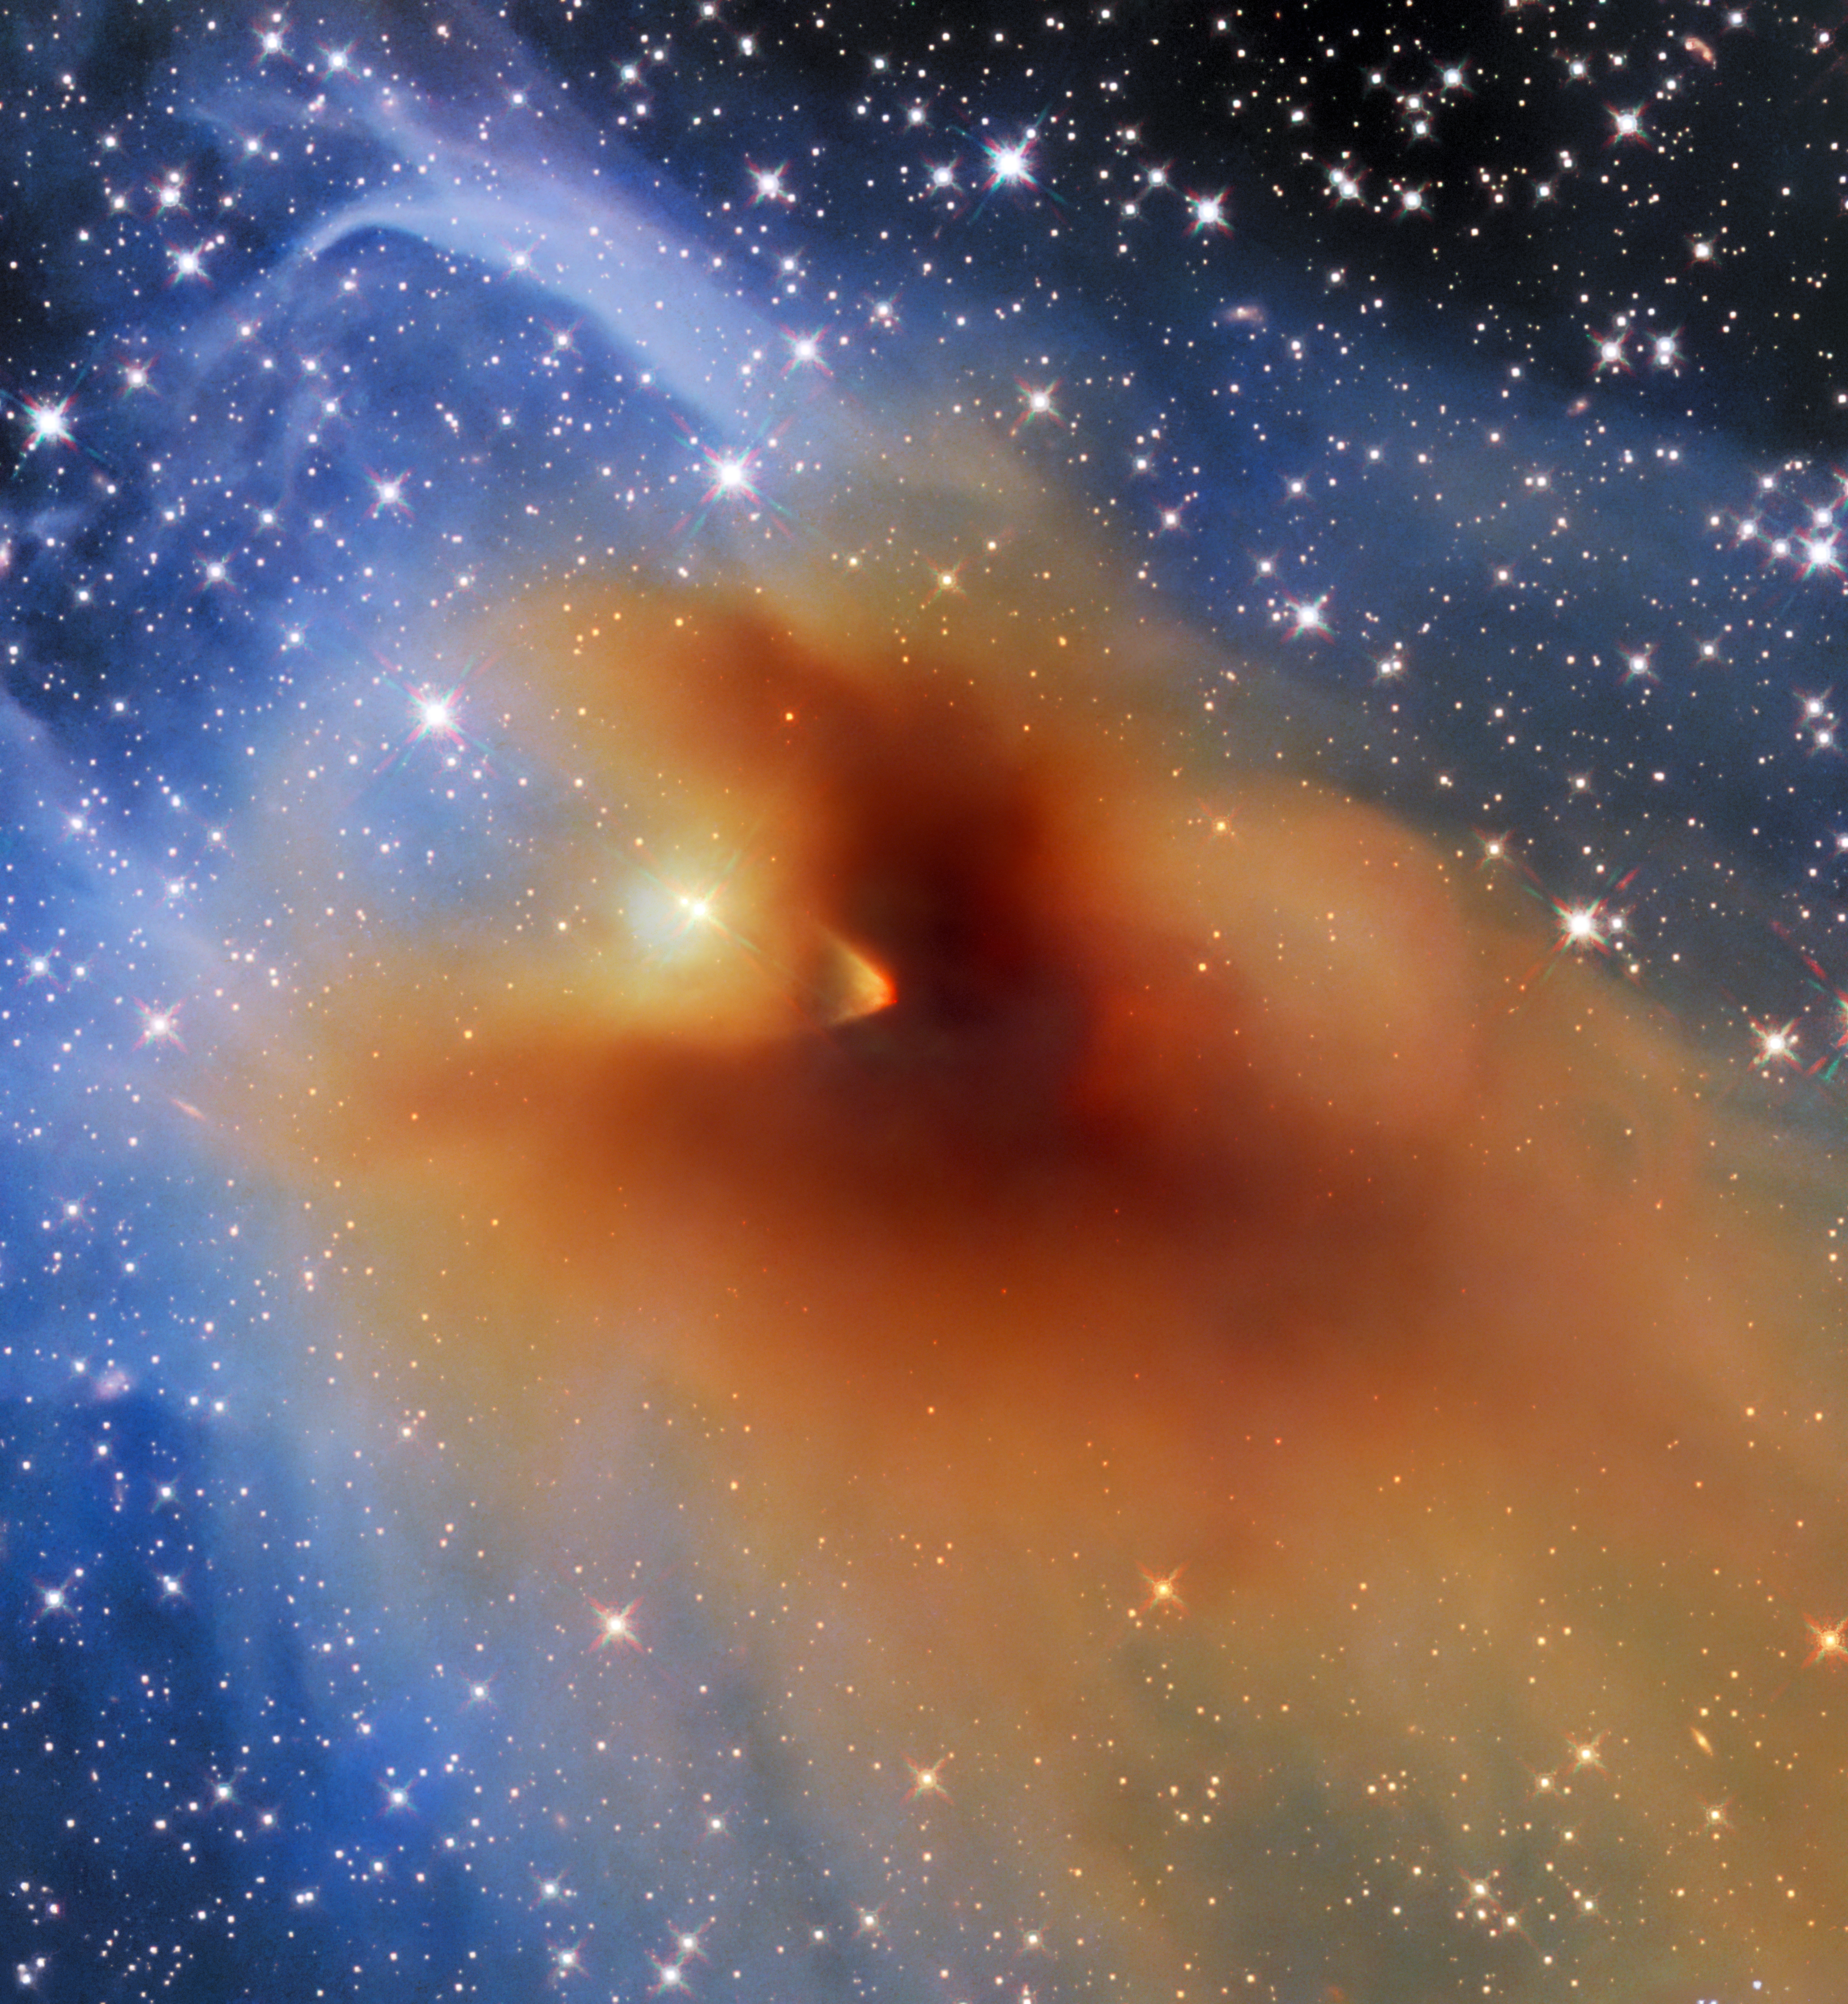

Clouded Vision

A small, dense cloud of gas and dust called CB 130-3 blots out the centre of this image from the NASA/ESA Hubble Space Telescope. CB 130-3 is an object known as a dense core, a compact agglomeration of gas and dust. This particular dense core is in the constellation Serpens, and seems to billow across a field of background stars.

Dense cores like CB 130-3 are the birthplaces of stars, and as such are of particular interest to astronomers. During the collapse of these cores enough mass can accumulate in one place to reach the temperatures and densities required to ignite hydrogen fusion, marking the birth of a new star. While it may not be obvious from this image, a compact object teetering on the brink of becoming a fully fledged star is embedded deep within CB 130-3.

Astronomers used Hubble’s Wide Field Camera 3 to better understand the environment surrounding this fledgling star. As this image shows, the density of CB 130-3 isn’t constant; the outer edges of the cloud consist of only tenuous wisps, whereas at its core CB 130-3 blots out background light entirely. The gas and dust making up CB 130-3 affect not only the brightness but also the colour of background stars, with stars towards the centre the cloud appearing redder than their counterparts at the outskirts of this image. Astronomers used Hubble to measure this reddening effect and chart out the density of CB 130-3, providing insights into the inner structure of this stellar nursery.

Credit: ESA/Hubble, NASA & STScI, C. Britt, T. Huard, A. Pagan